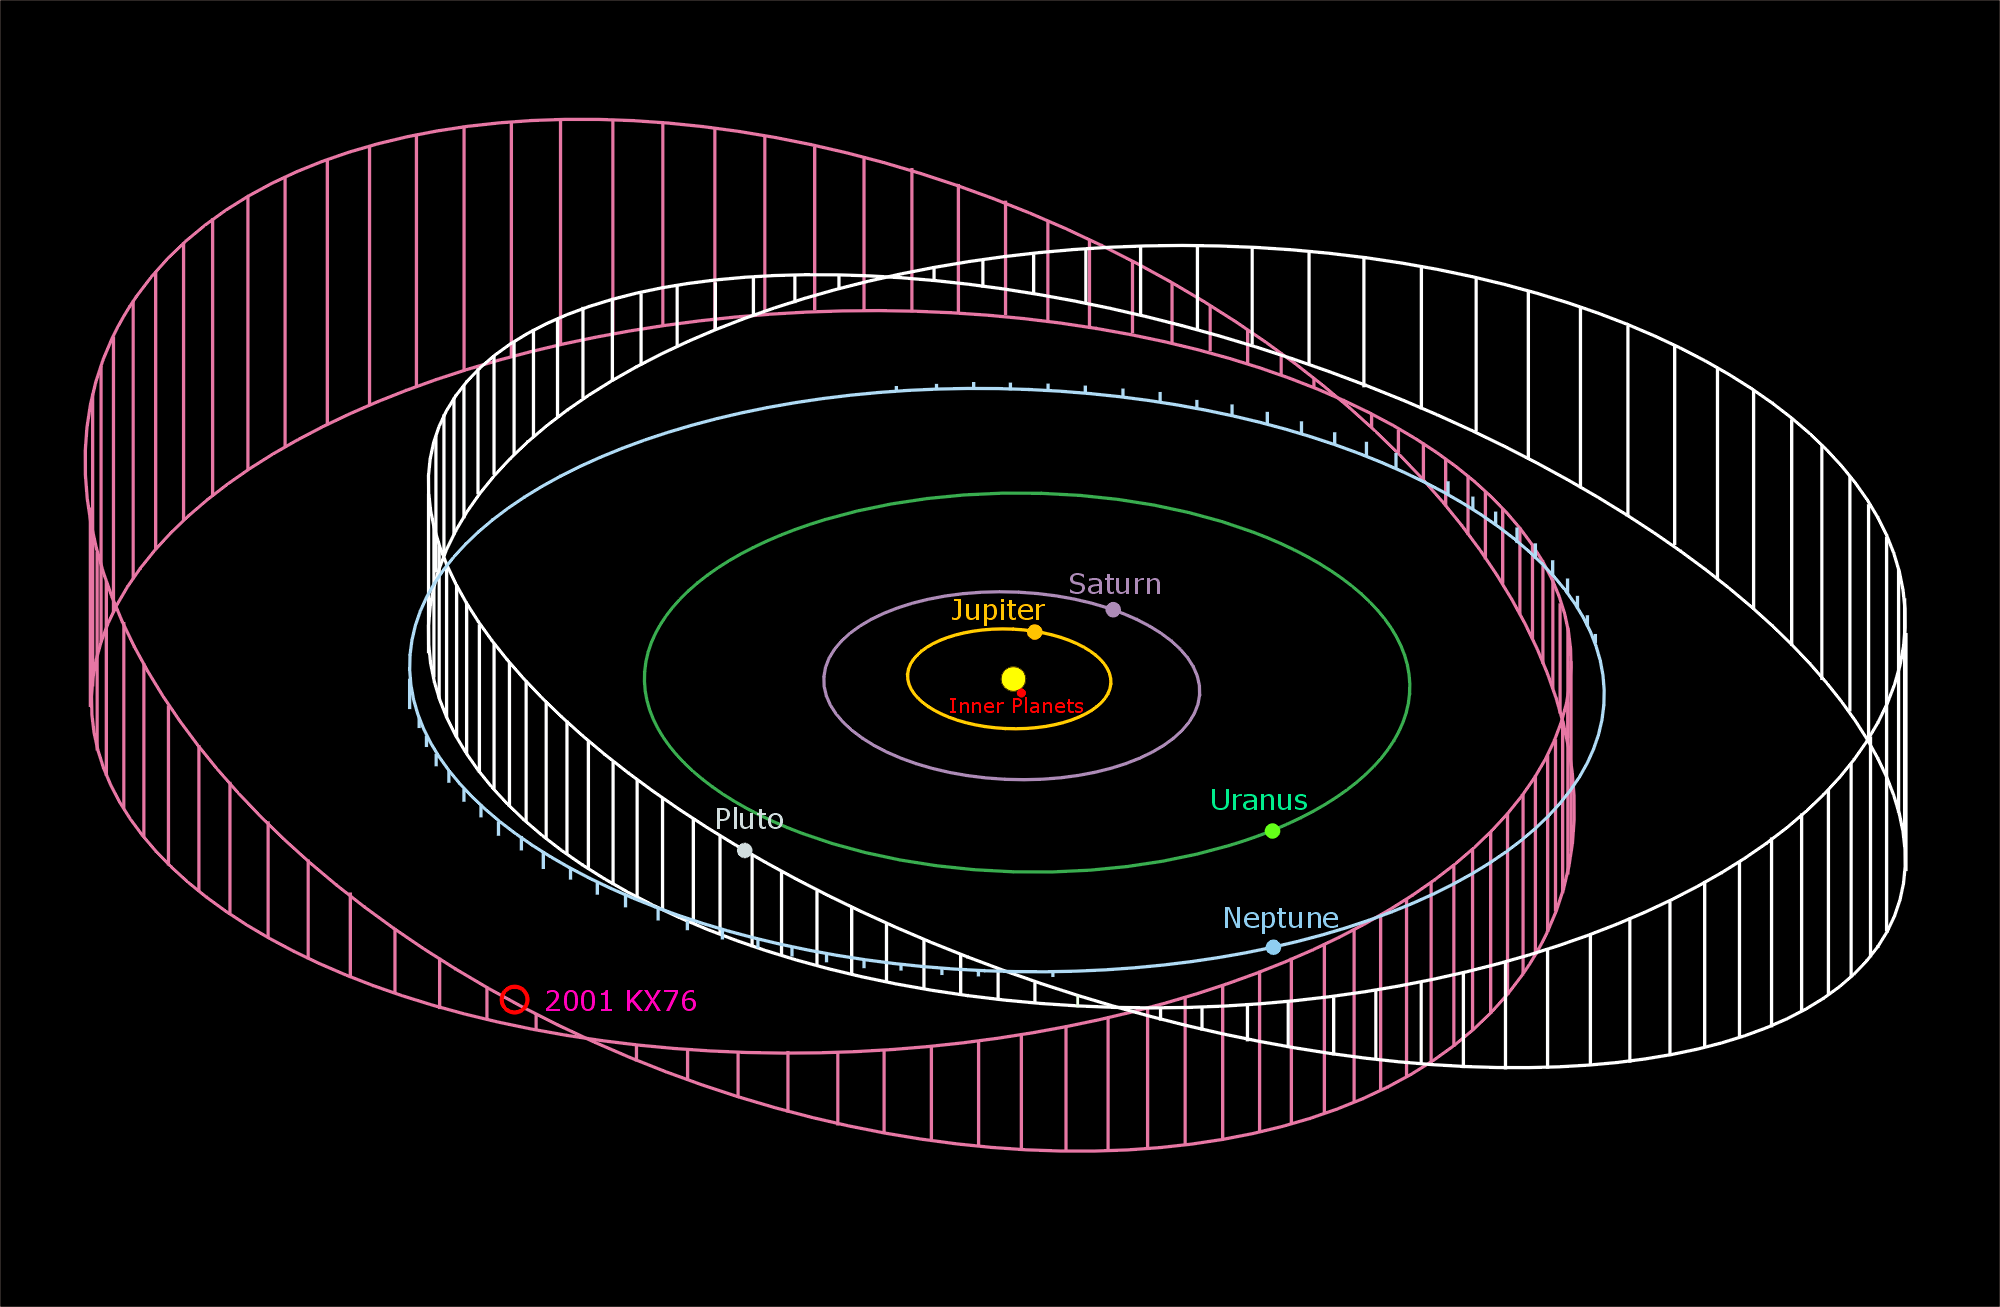

The orbit of 2001 KX76 compared to the orbit of the planets

This diagram illustrates the orbit of asteroid 2001 KX76 - a Kuiper Belt Object and the largest asteroid in the Solar System. Its orbit is very similar to that of the planet Pluto.

Credit: ESA, ESO, Astrovirtel & Gerhard Hahn (German Aerospace Center, DLR)